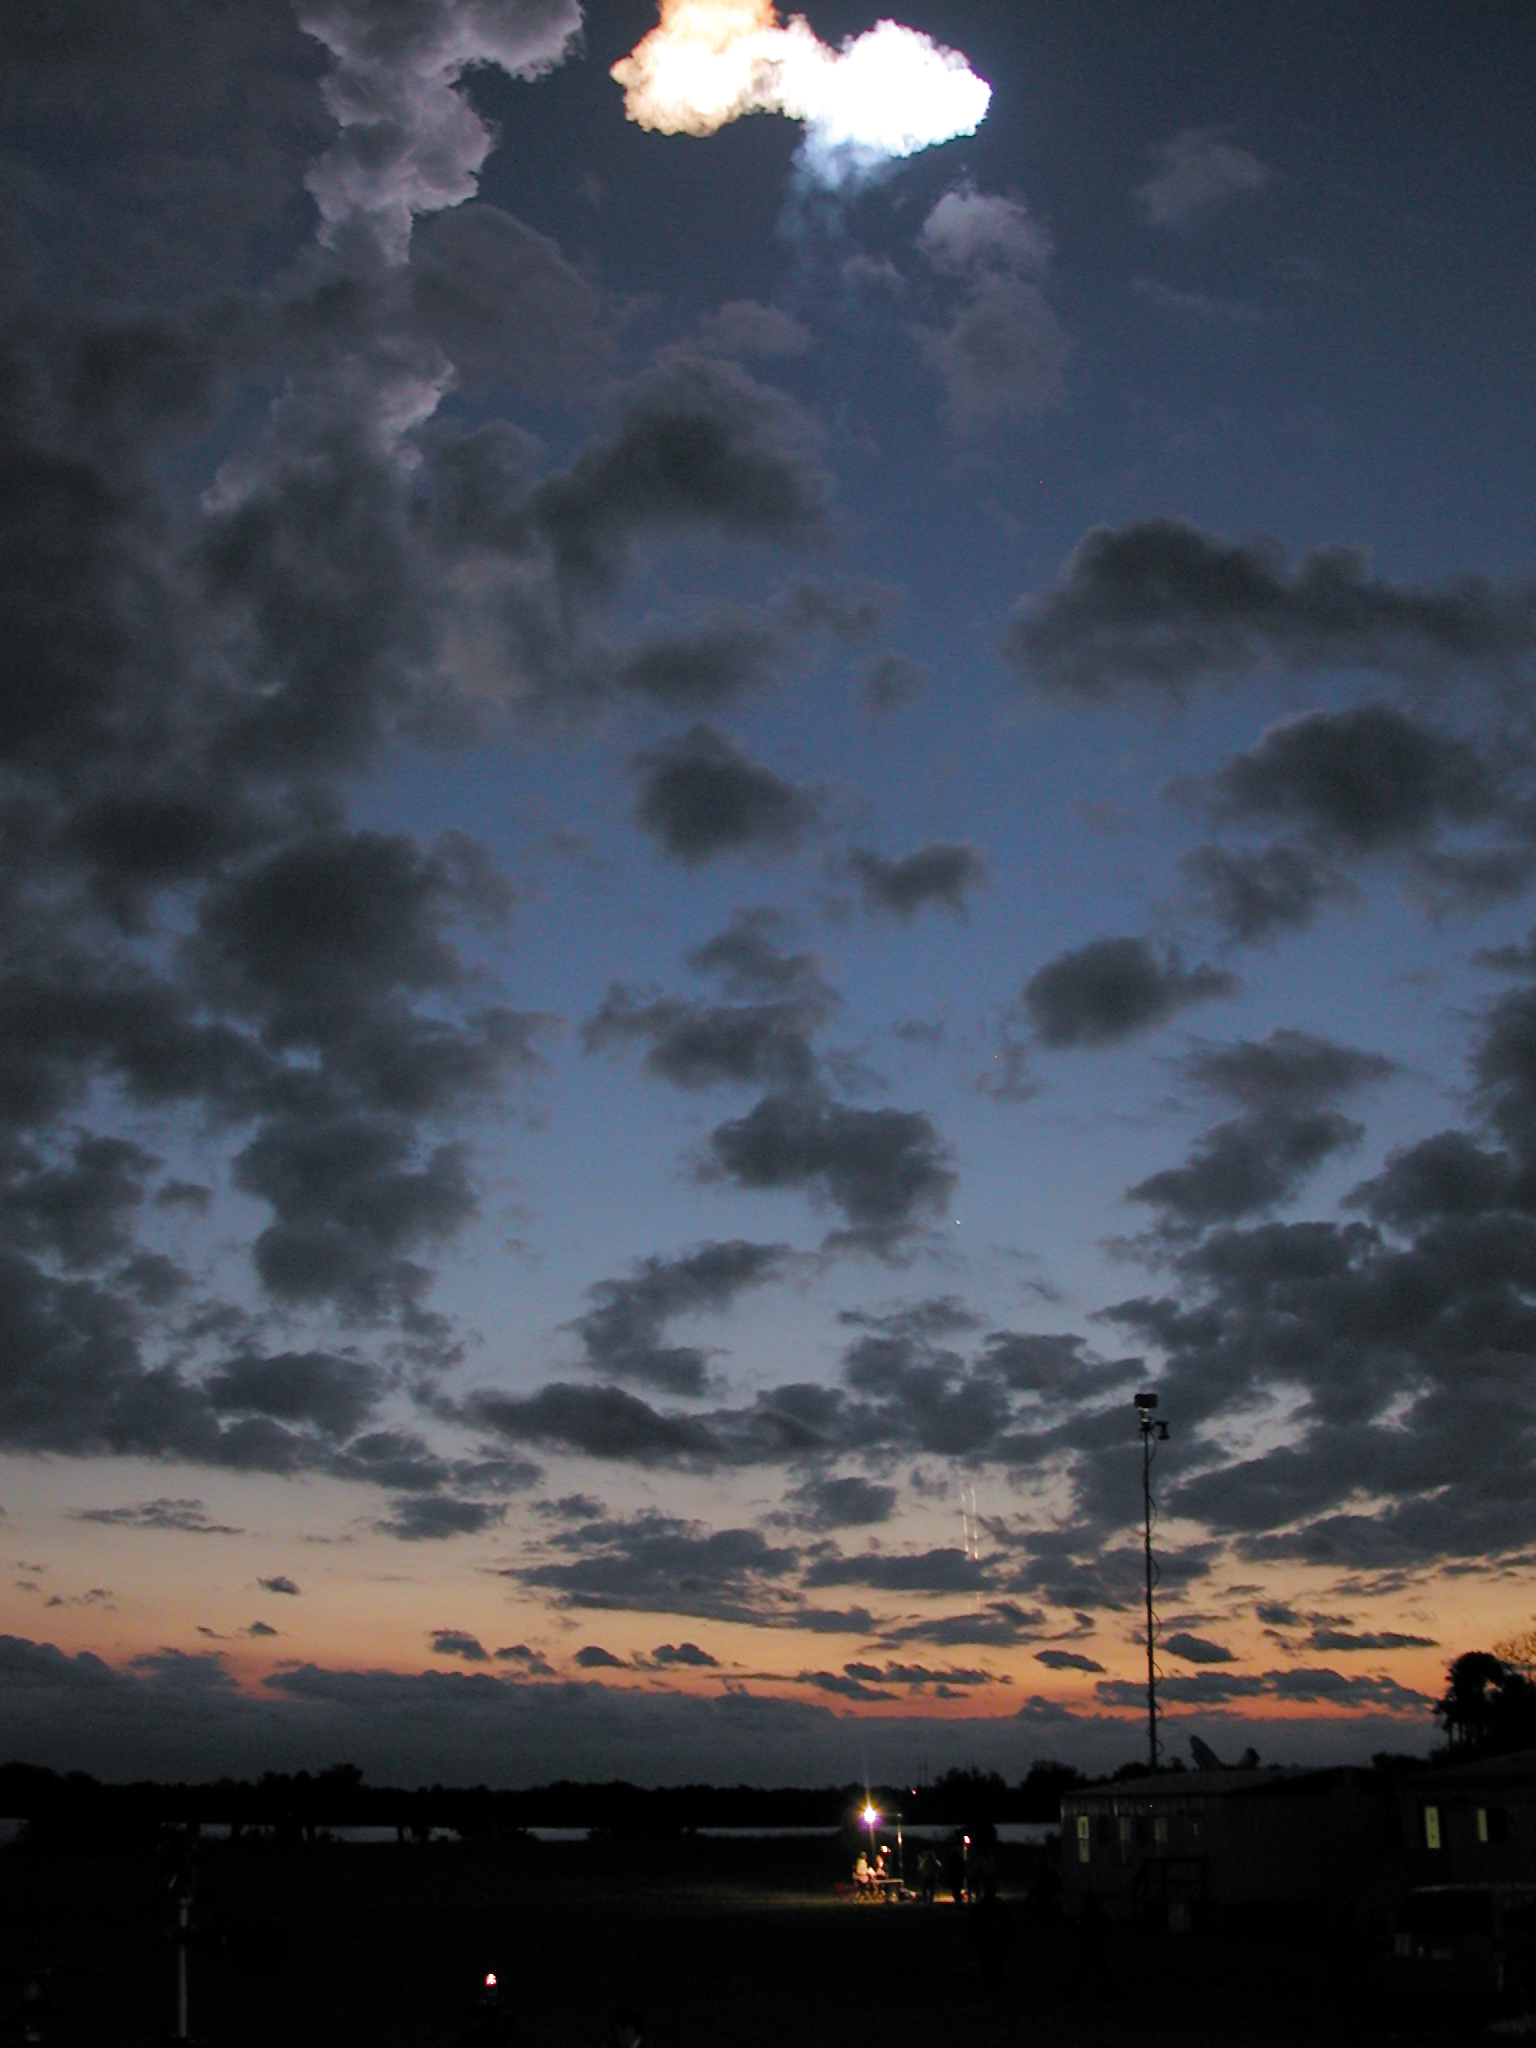

SM3B - Columbia disappears into the distance

This image was taken minutes after the launch of Space Shuttle Columbia (the very small dot at the centre). At the top of the image the cloud from the solid booster separation is seen. The boosters themselves can be see below leaving a smoke trail as they make their way to the ocean surface where a ship waits to pick them up.

The Space Shuttle Colombia was launched on 1 March 2002 for the fourth Hubble Servicing Mission (SM3B).

Credit: ESA 2002. Photo by Lars Lindberg Christensen